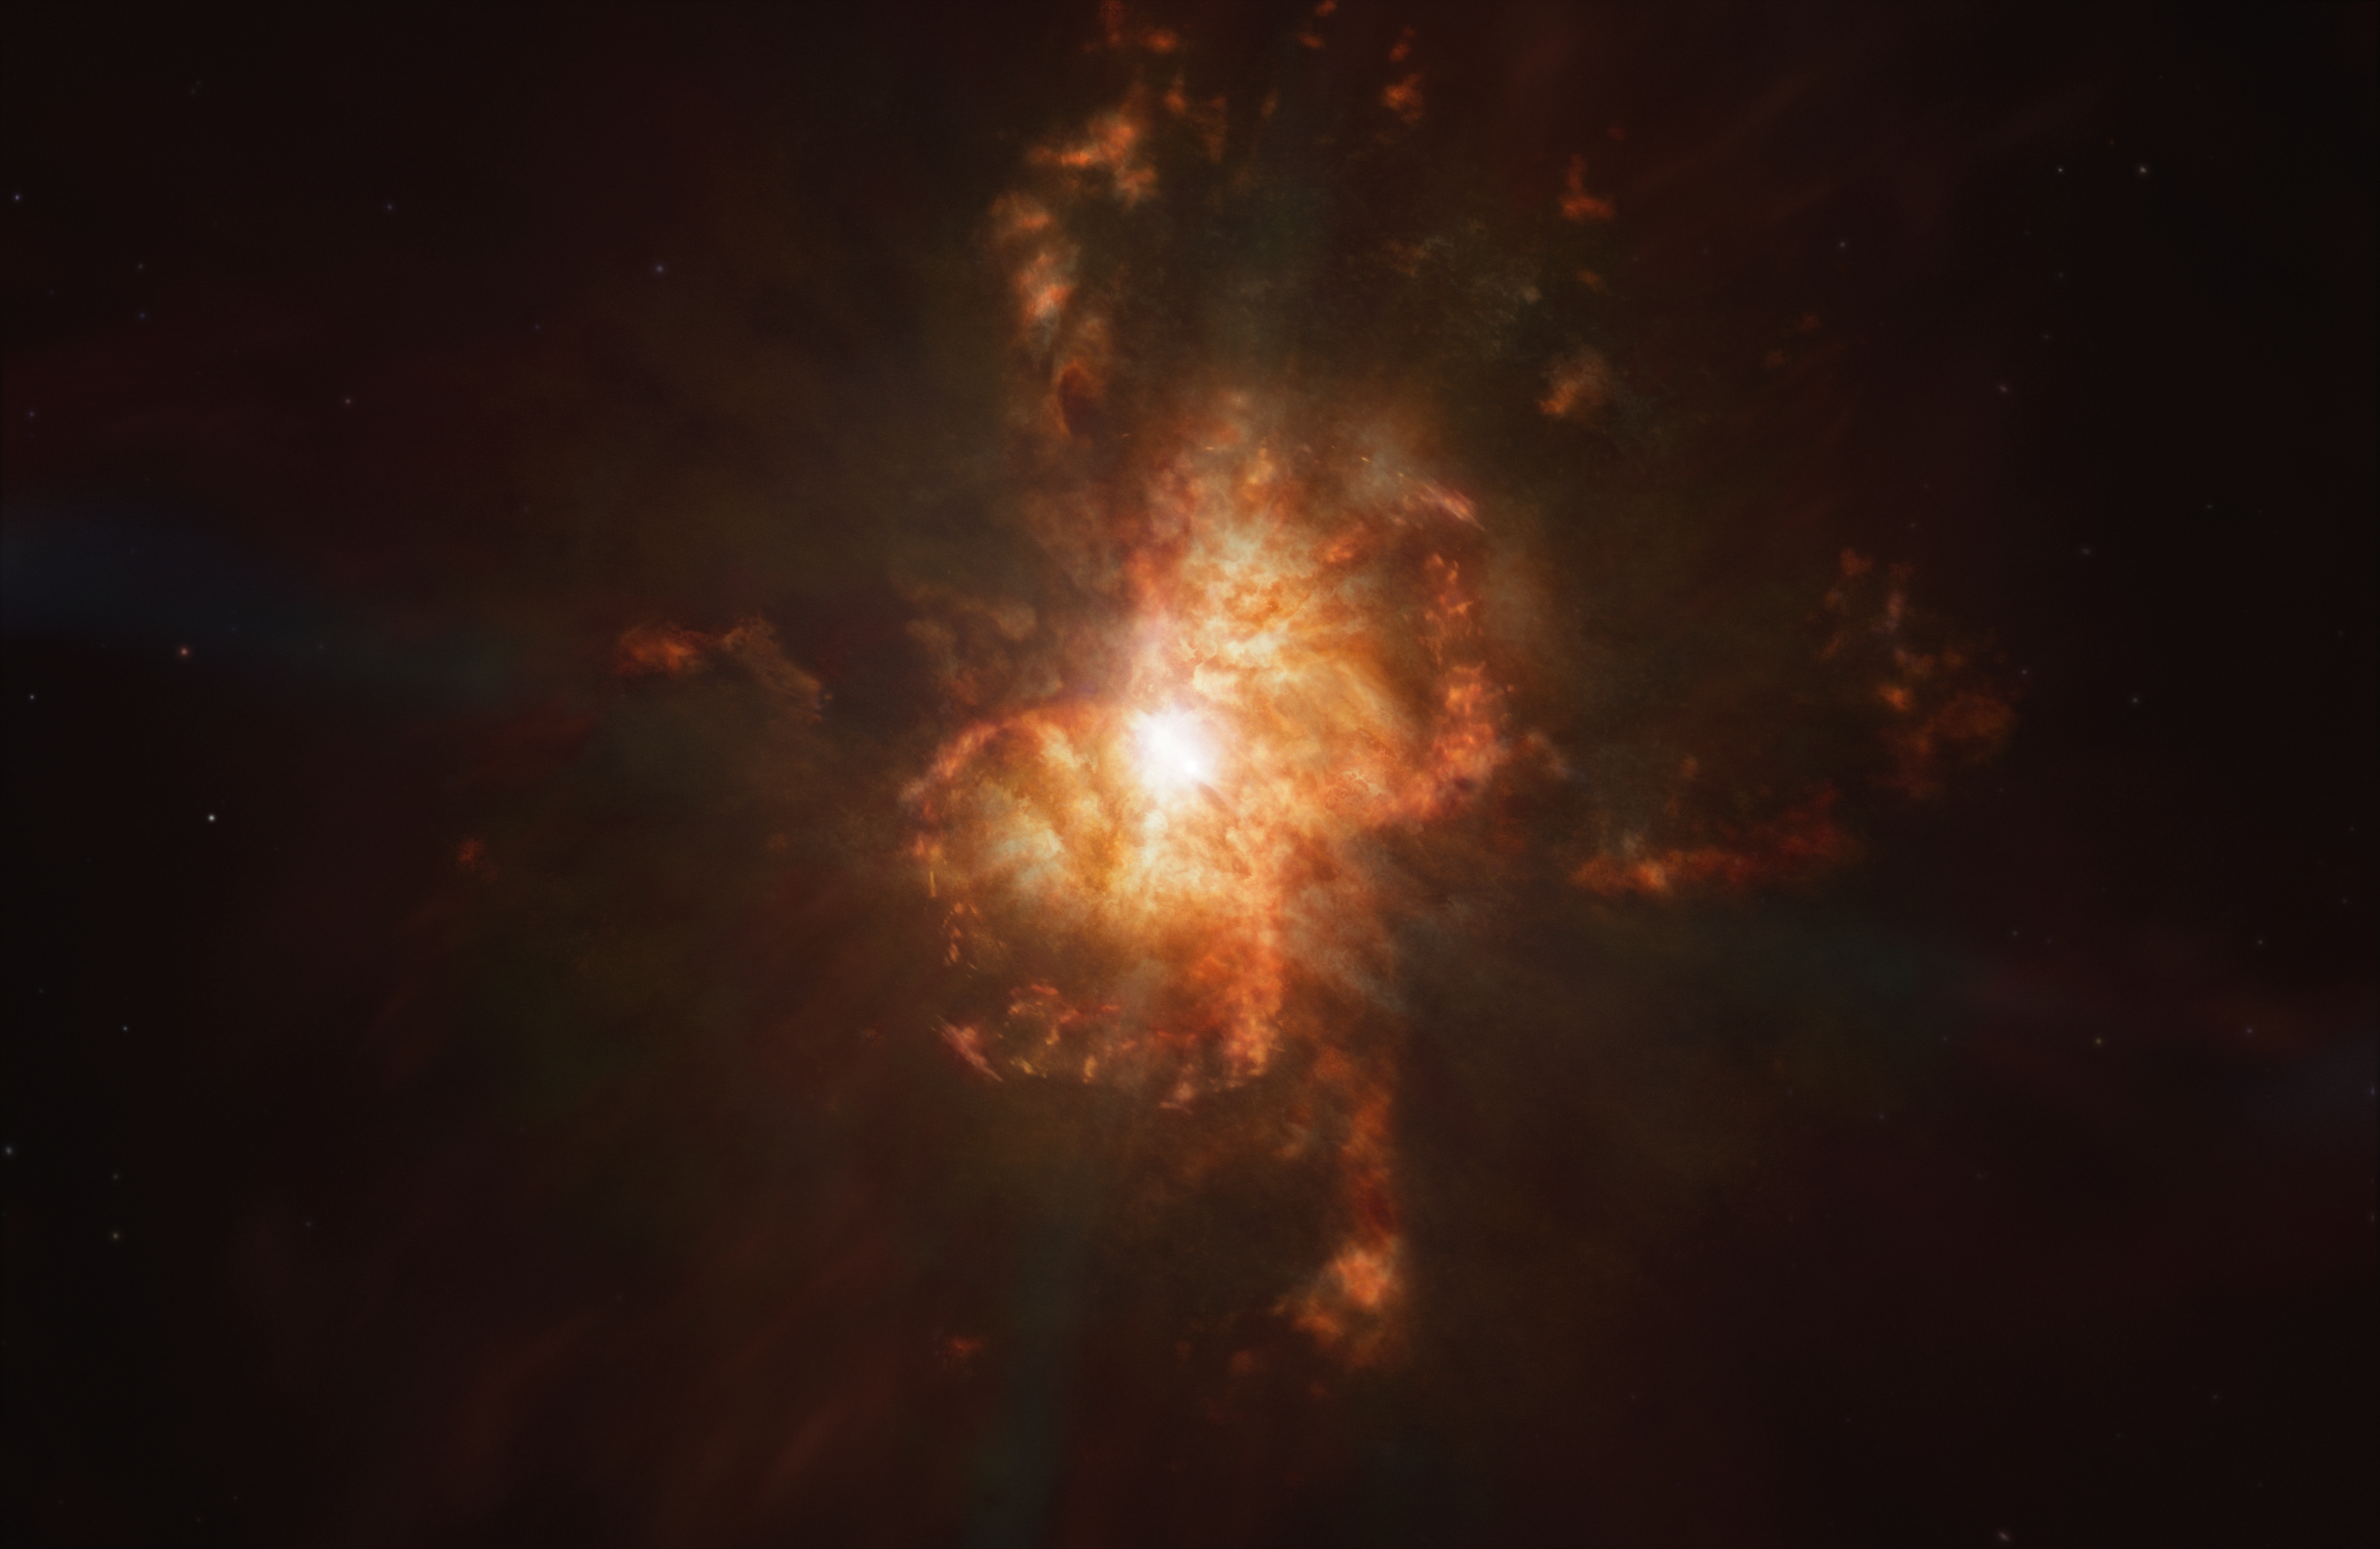

Formation of the Southern Crab Nebula (artist's impression)

This artist's impression of the formation of Southern Crab nebula illustrates its hourglass-shared structure, that has been created by the interaction between a pair of stars at its centre: a red giant and a white dwarf. The red giant is shedding its outer laters in the last phase of its life before it too lives out its final years as a white dwarf.

Credit: ESA/Hubble, M. Kornmesser